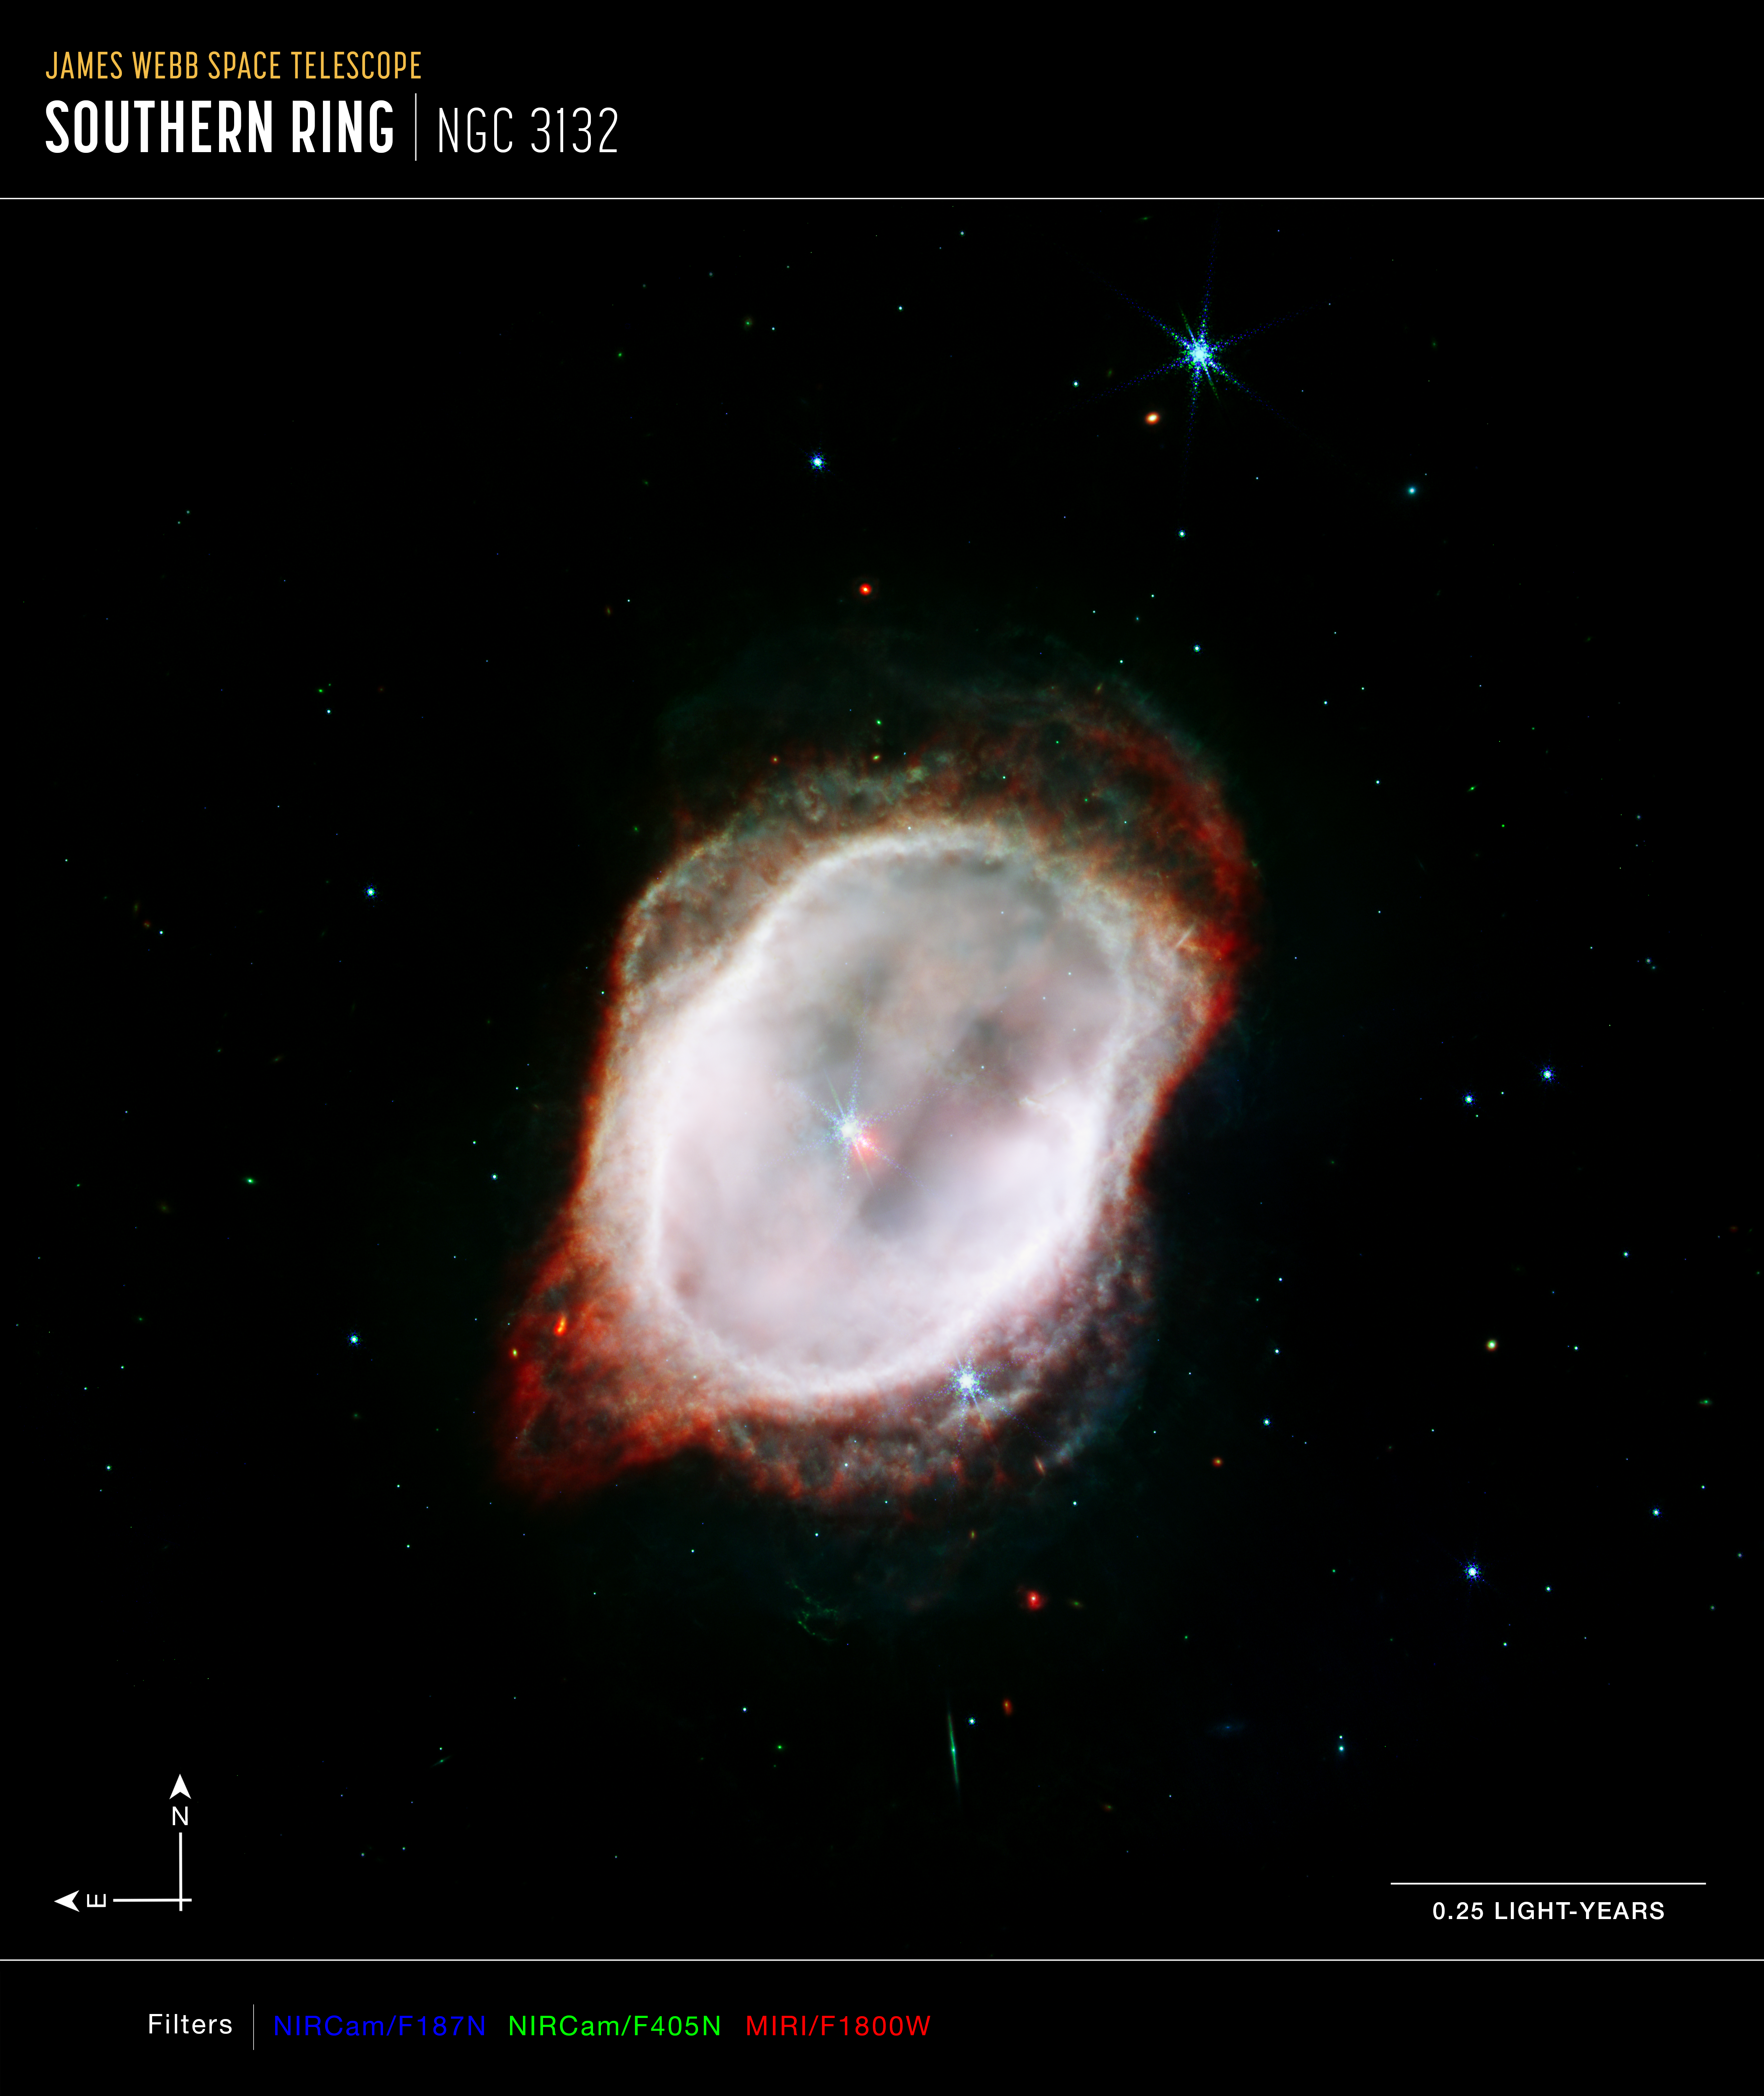

Southern Ring Nebula’s Gas (NIRCam and MIRI Composite Compass Image - Annotated)

This is an image of the Southern Ring Nebula (NGC 3132), captured by the NASA/ESA/CSA James Webb Space Telescope’s Near-Infrared Camera (NIRCam) and Mid-Infrared Instrument (MIRI). The image combines near- and mid-infrared light from three filters.

Webb’s image traces the star’s scattered outflows that have reached farther into the cosmos. Most of the molecular gas that lies outside the band of cooler gas is also cold. It is also far clumpier, consisting of dense knots of molecular gas that form a halo around the central stars.

The north and east compass arrows show the orientation of the image on the sky. Note that the relationship between north and east on the sky (as seen from below) is flipped relative to direction arrows on a map of the ground (as seen from above).

The scale bar is labeled in light-years, which is the distance that light travels in one Earth-year. (It takes 0.25 years for light to travel a distance equal to the length of the scale bar.) One light-year is equal to about 9.46 trillion kilometers. The field of view shown in this image is approximately 0.25 light-years across.

This image shows invisible near-infrared and mid-infrared wavelengths of light that have been translated into visible-light colors. The color key shows which NIRCam and MIRI filters were used when collecting the light. The color of each filter name is the visible light color used to represent the infrared light that passes through that filter.

Credit: NASA, ESA, CSA, STScI, O. De Marco (Macquarie University), J. DePasquale (STScI)